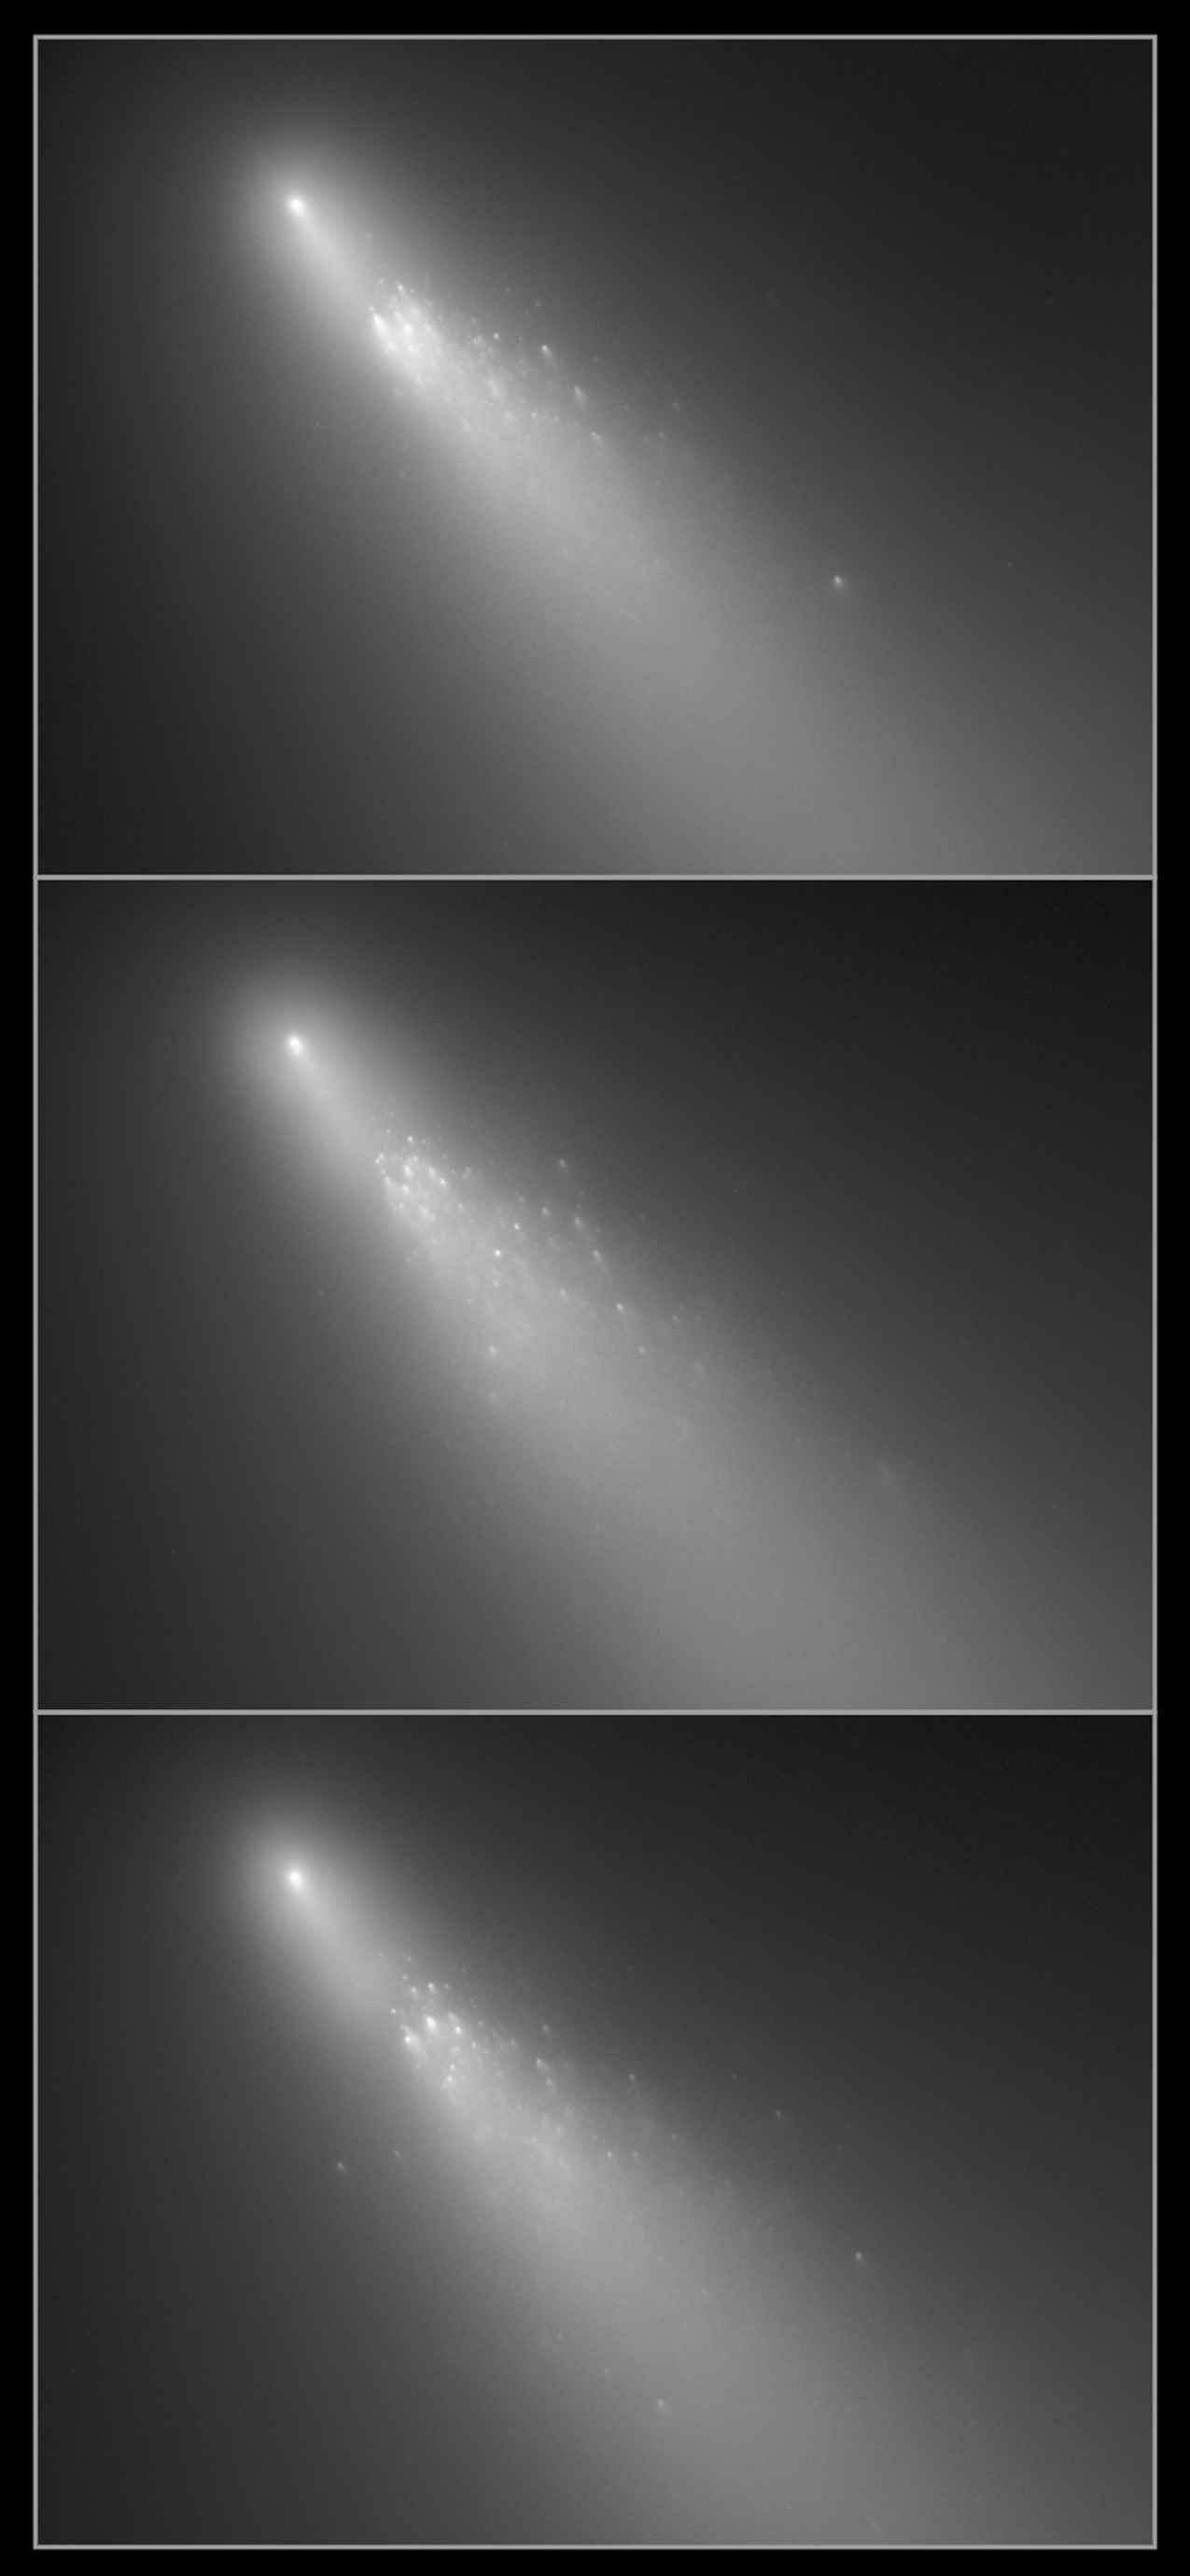

Spectacular view of ongoing comet breakup

Hubble Space Telescope is providing astronomers with extraordinary views of Comet 73P/Schwassmann-Wachmann 3. The fragile comet is rapidly disintegrating as it approaches the Sun. Hubble images have uncovered many more fragments than have been reported by ground-based observers. These observations provide an unprecedented opportunity to study the demise of a comet nucleus. The comet is currently a chain of over 33 separate fragments, named alphabetically, stretching across the sky by several times the angular diameter of the Moon. Hubble caught fragment B during three days shortly after large outbursts in activity (from top to bottom: 18 April, 19 April and 20 April). Hubble shows several dozen "mini-comets" trailing behind each main fragment, probably associated with the ejection of house-sized chunks of surface material. Deep-freeze relics of the early Solar System, cometary nuclei are porous and fragile mixes of dust and ices that can break apart due to the thermal, gravitational, and dynamical stresses of approaching the Sun. Whether any of the many fragments survive the trip around the Sun remains to be seen in the weeks ahead.

Credit: NASA, ESA, H. Weaver (APL/JHU), M. Mutchler and Z. Levay (STScI)